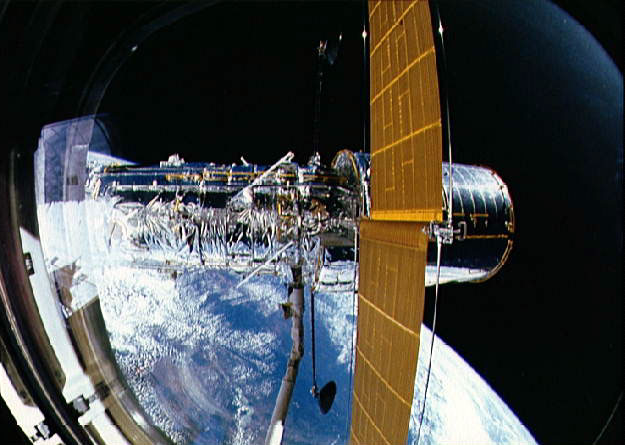

Deployment of the Hubble Space Telescope

Deployment of the Hubble Space Telescope

Credit: NASA & ESA